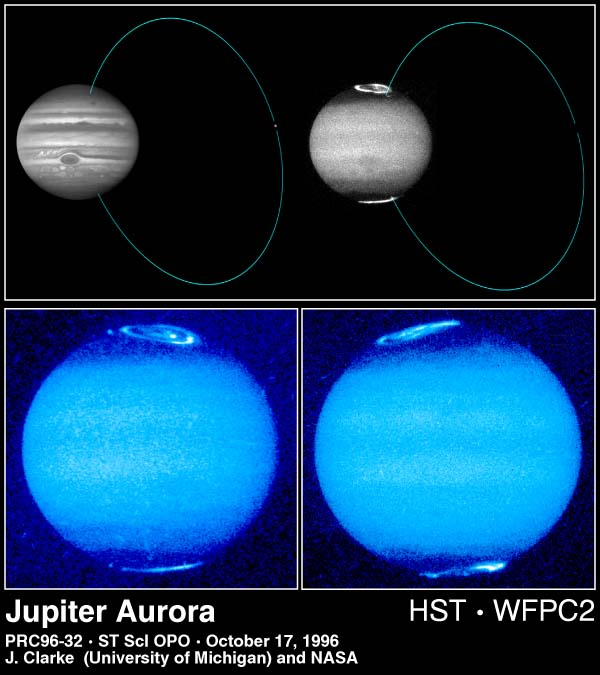

Jupiter's Aurora

These images, taken by the Hubble Space Telescope, reveal changes in Jupiter's auroral emissions and how small auroral spots just outside the emission rings are linked to the planet's volcanic moon, Io.

The images represent the most sensitive and sharply-detailed views ever taken of Jovian auroras.

Credit: John T. Clarke and Gilda E. Ballester (University of Michigan), John Trauger and Robin Evans (Jet Propulsion Laboratory), and NASA/ESA